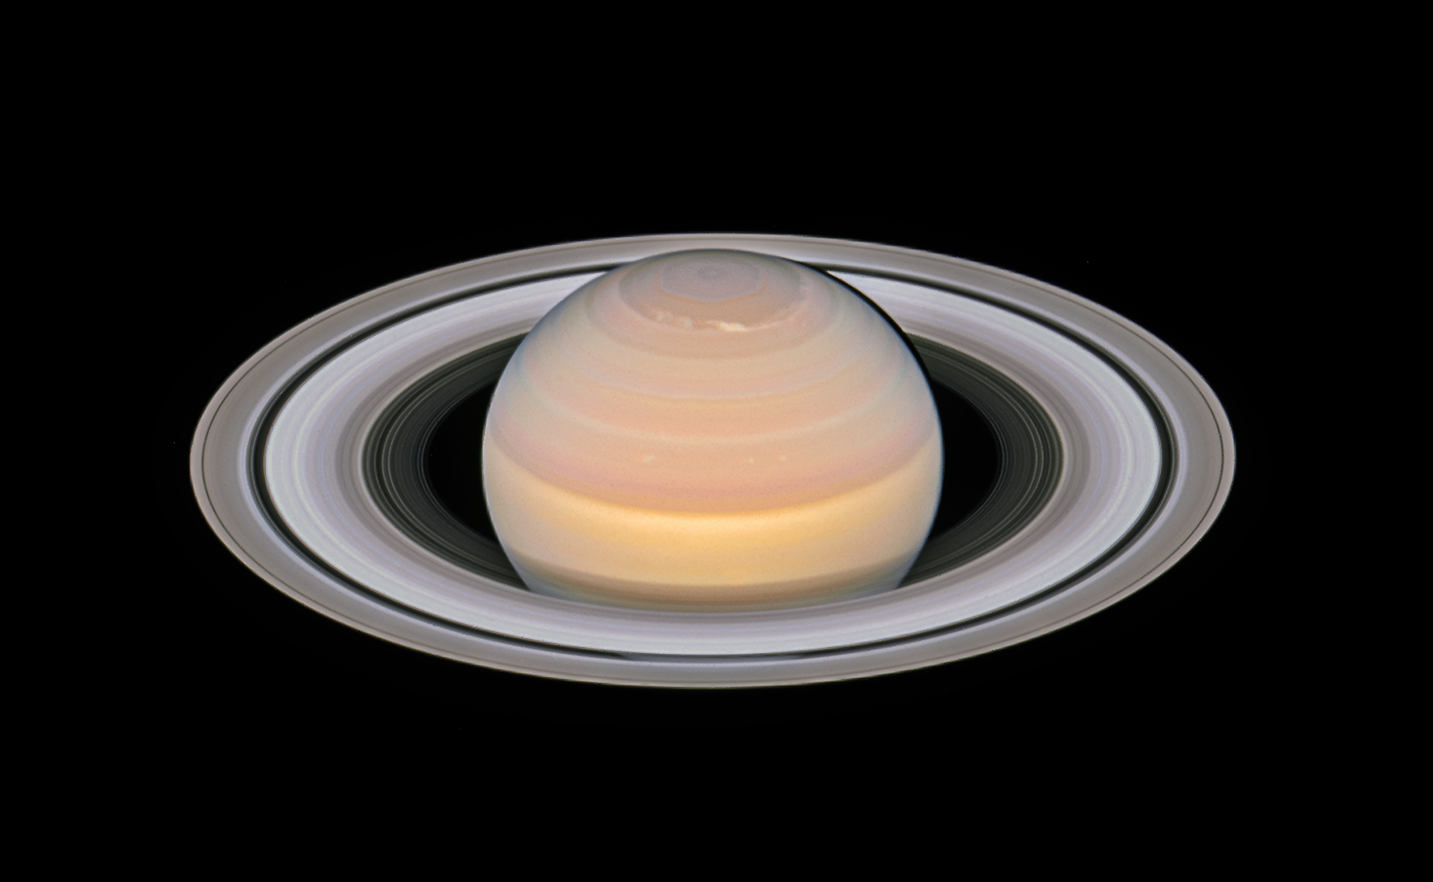

Saturn and its rings in 2018

The NASA/ESA Hubble Space Telescope was used to observe the planet on 6 June 2018, when Saturn was approximately 1.4 billion kilometres from Earth. Visible in this Hubble image are the classic rings as recorded by the very first astronomers to observe the planet with telescopes. From the outside in are the A ring with the Encke Gap, the Cassini Division, the B ring, and the C ring with the Maxwell Gap.

Data from NASA’s Cassini mission suggest that the rings formed about 200 million years ago, roughly around the time of the dinosaurs during the Jurassic period. The gravitational disintegration of one of Saturn’s small moons created myriad icy debris particles and collisions lasting until today; it is likely that they continually replenish the rings.

The planet’s banded structure, clearly visible in the new image, is caused by the winds and the clouds at different altitudes.

Credit: NASA, ESA, A. Simon (GSFC) and the OPAL Team, and J. DePasquale (STScI)